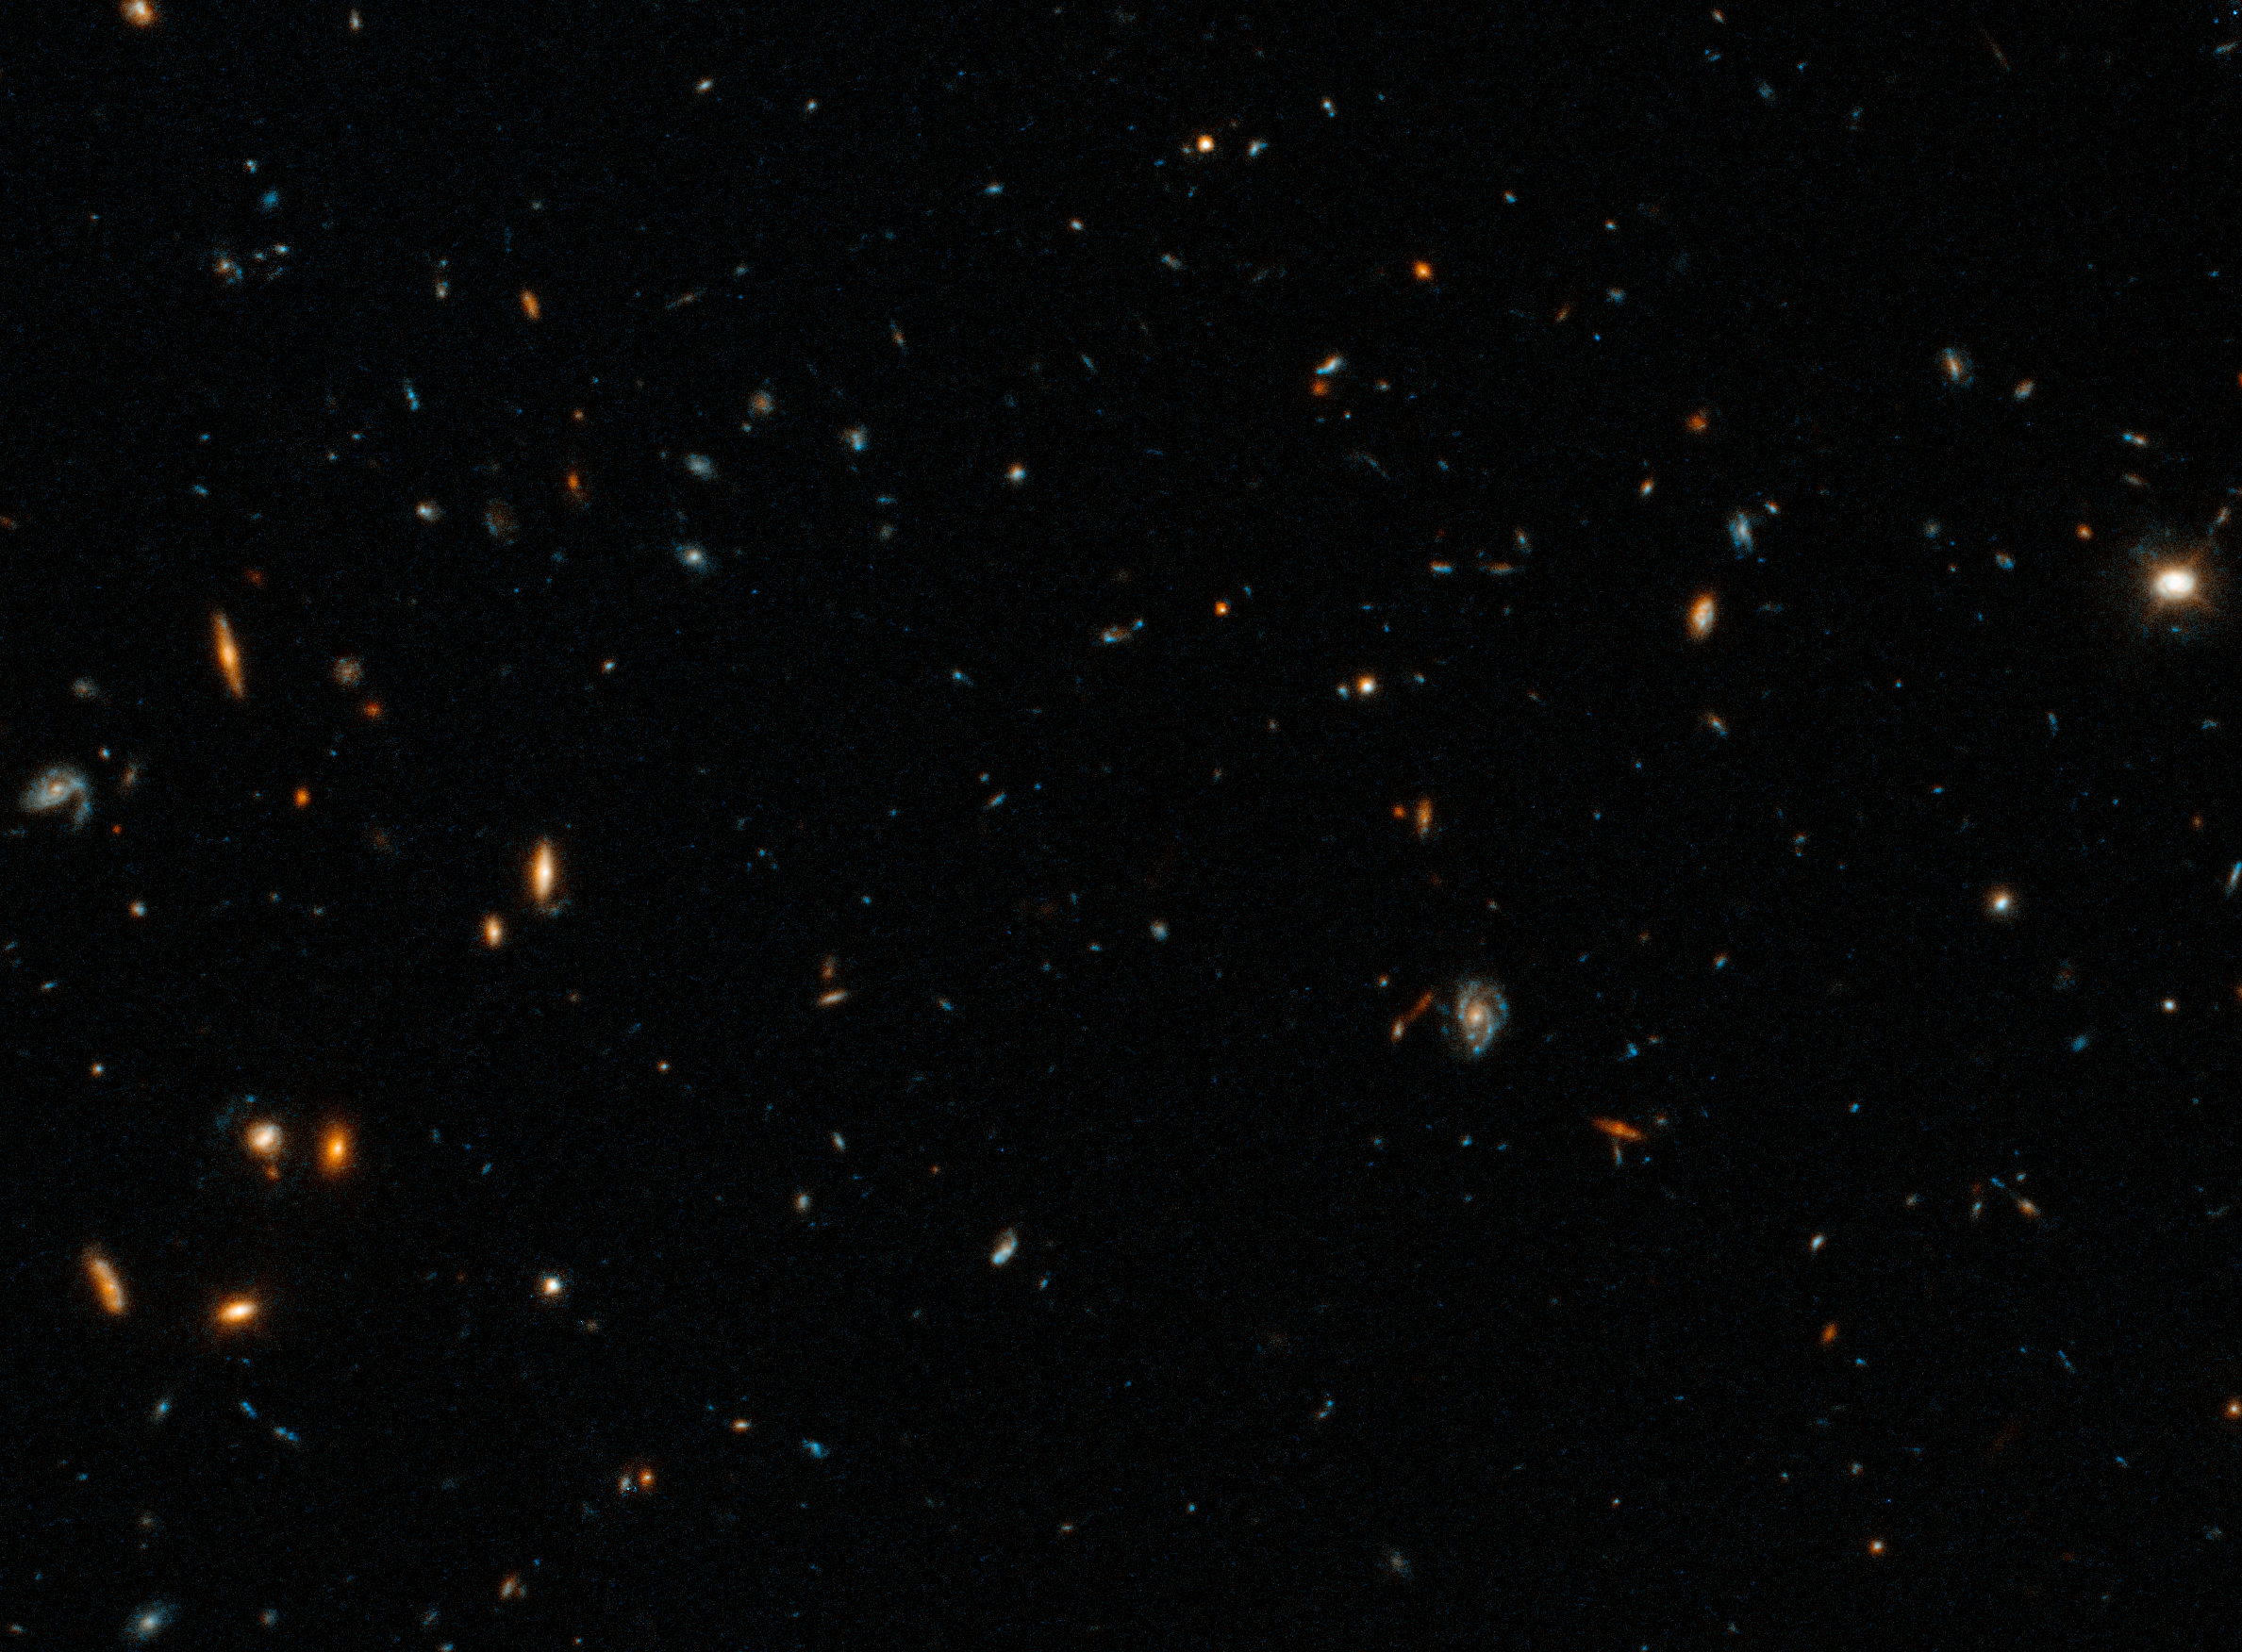

Hubble photographs home of farthest fast radio burst (clean image)

A Hubble Space Telescope image of the host galaxy of an exceptionally powerful Fast Radio Burst, FRB20220610A. Hubble’s sensitivity and sharpness reveals a compact group of multiple galaxies that may be in the process of merging. They existed when the Universe was only 5 billion years old. FRB 20220610A was first detected on June 10, 2022 by the Australian Square Kilometre Array Pathfinder (ASKAP) radio telescope in Western Australia, and confirmed to come from a distant origin by the European Southern Observatory’s Very Large Telescope in Chile.

Credit: NASA, ESA, STScI, Alexa Gordon (Northwestern University)